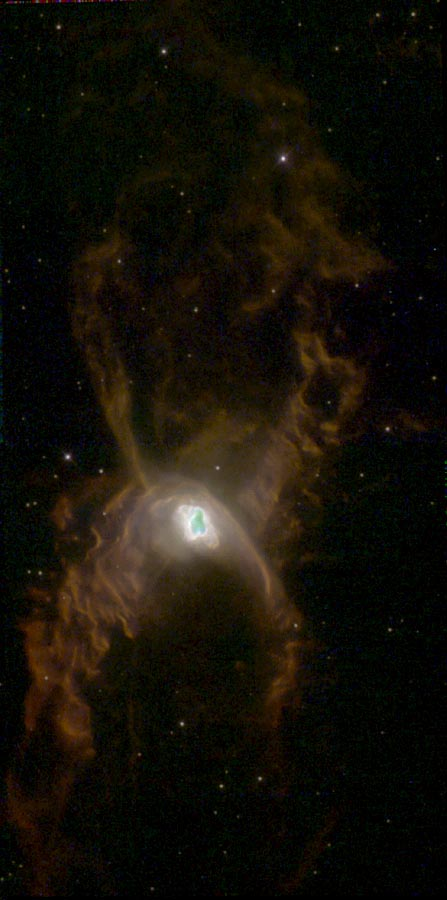

NGC 6537

This image is a part of the Hubble Gallery of Planetary Nebulae.

Credit: Bruce Balick (University of Washington), Vincent Icke (Leiden University), Garrelt Mellema (Stockholm University) and NASA/ESA